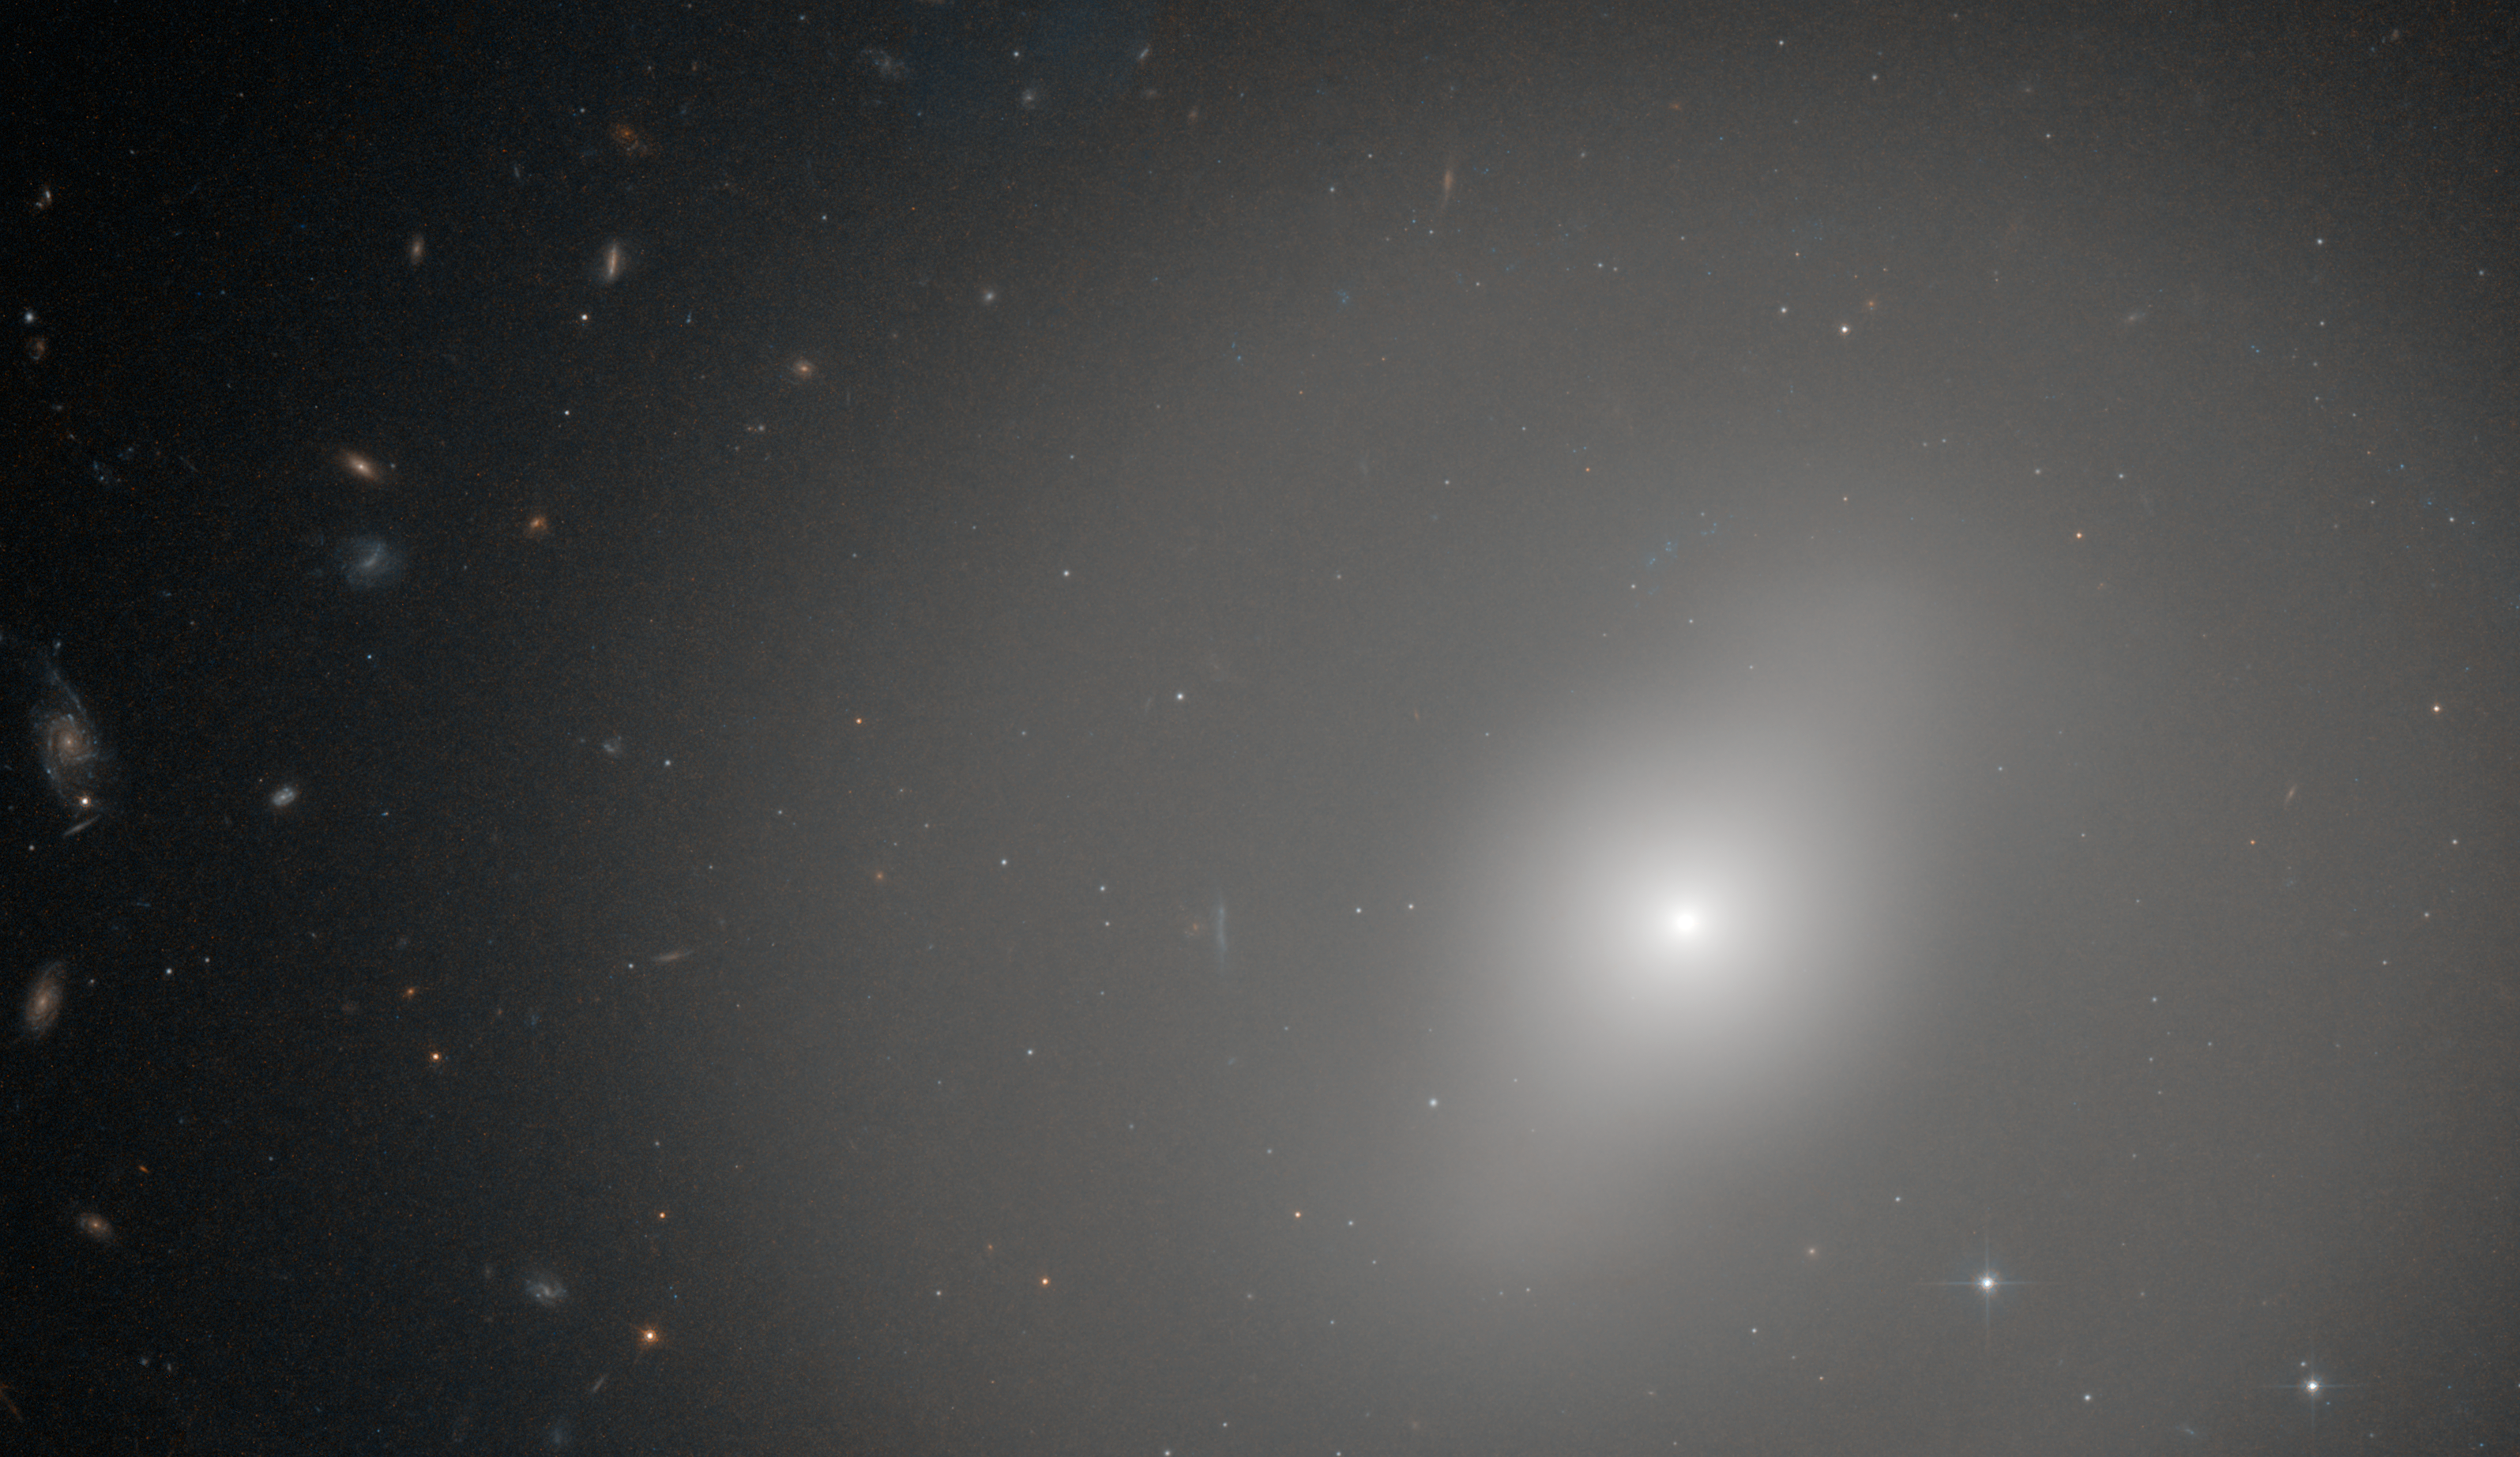

Red, but not dead

This NASA/ESA Hubble Space Telescope picture depicts the galaxy NGC 1533 in the southern constellation of Dorado (the Dolphin-fish). Around 62 million light-years from Earth, NGC 1533, which is classed as a lenticular galaxy, is a transitional type that shows characteristics of both spiral and elliptical galaxies.

Like elliptical galaxies, NGC 1533 is largely made up of older and redder stars and vast numbers of them create the smooth glow across the whole picture. However, it also has a residual level of star formation and some young blue stars, which are revealed by its weak barred spiral structure that is faintly visible in this image. Astronomers studying star formation in this type of galaxy are able to subtract the bright light of the stars to reveal the details of a subtle spiral structure that cannot be well seen in less heavily processed images such as this one.

John Herschel, son of William Herschel, the astronomer who discovered Uranus, found NGC 1533 in 1834 during his survey of the southern skies from the Cape of Good Hope.

The image was created from images taken using the Wide Field Channel of Hubble's Advanced Camera for Surveys. It is a composite of images taken through yellow (F606W) and near-infrared (F814W) filters. The total exposure times were 38 minutes and 82 minutes respectively and the field of view is about 2.6 by 1.5 arcminutes across.

Credit: ESA/Hubble and NASA